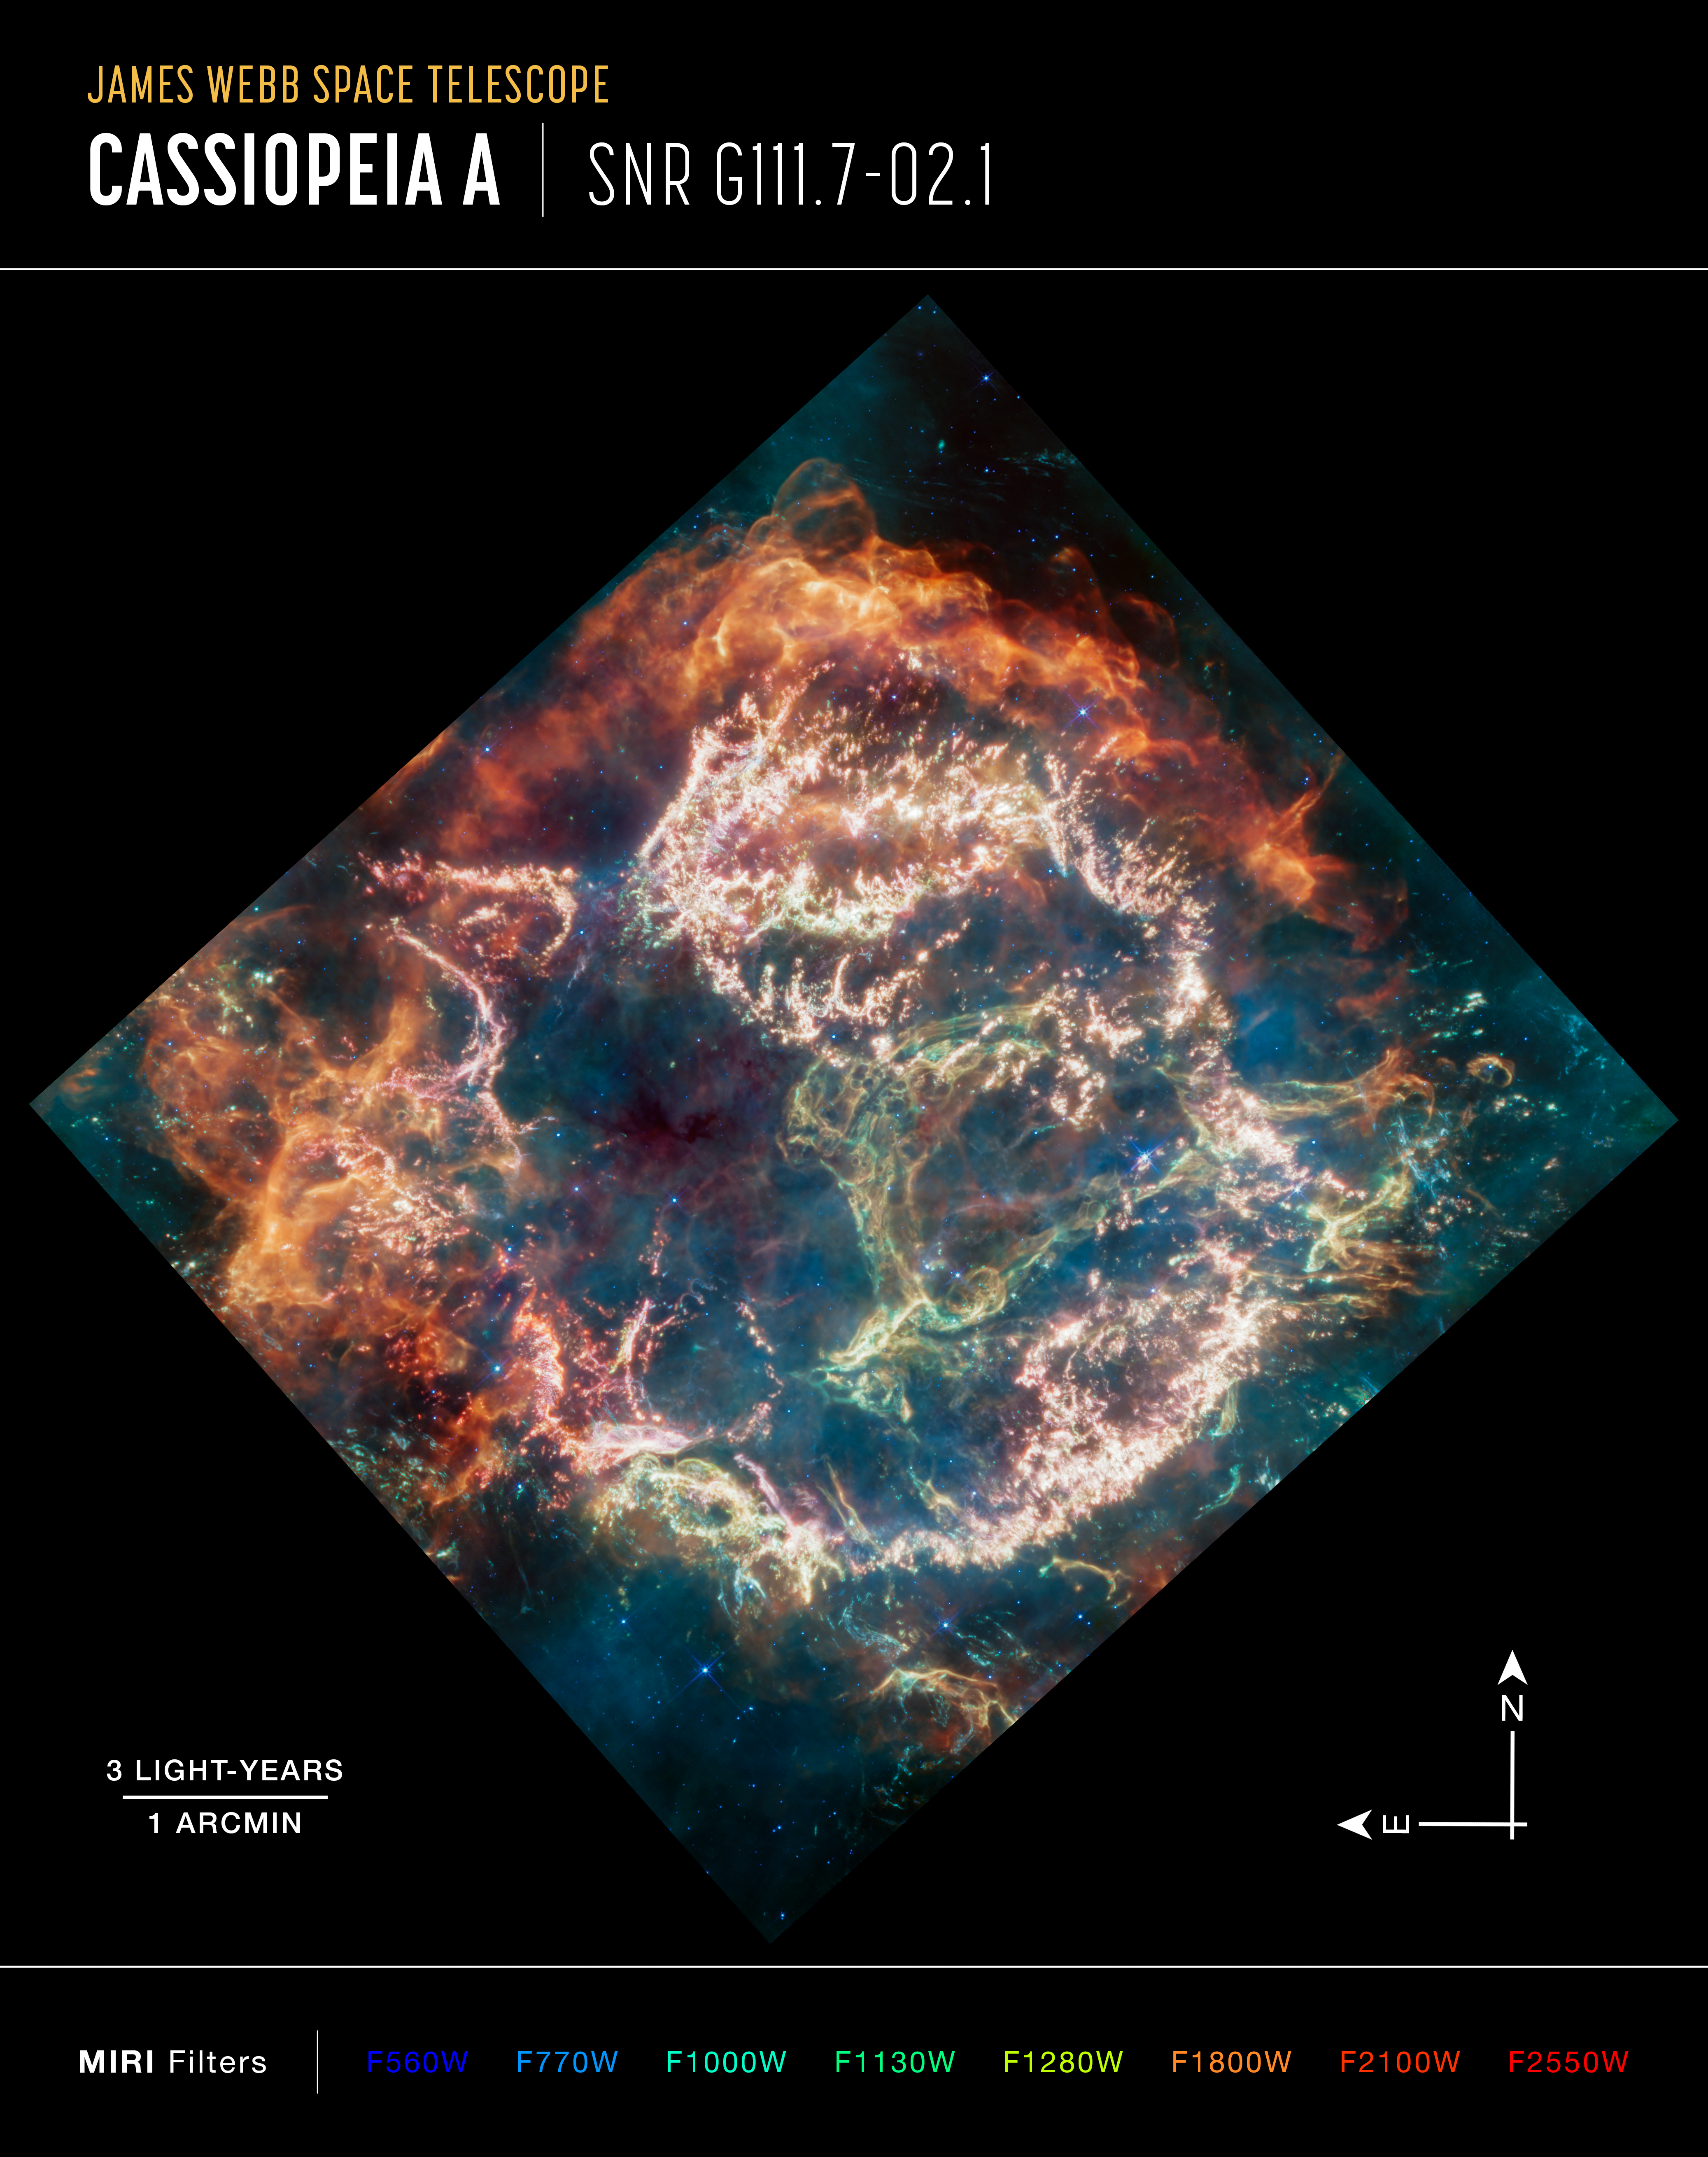

Cassiopeia A (MIRI Image, Annotated)

Cassiopeia A (Cas A) is a supernova remnant located about 11 000 light-years from Earth in the constellation Cassiopeia. It spans approximately 10 light-years. This new image uses data from Webb’s Mid-InfraRed Instrument (MIRI) to reveal Cas A in a new light.

On the remnant’s exterior, particularly at the top and left, lie curtains of material appearing orange and red that are due to emission from warm dust. This marks where ejected material from the exploded star is ramming into surrounding circumstellar material.

Interior to this outer shell lie mottled filaments of bright pink studded with clumps and knots. This represents material from the star itself, and likely shines by the light produced by a mix of heavy elements and dust emission. The stellar material can also be seen as fainter wisps near the cavity’s interior.

A loop represented in green extends across the right side of the central cavity. Its shape and complexity are unexpected and challenging for scientists to understand.

This image combines data from various filters, with the colour red assigned to 25.5 microns (F2550W), orange-red to 21 microns (F2100W), orange to 18 microns (F1800W), yellow to 12.8 microns (F1280W), green to 11.3 microns (F1130W), cyan to 10 microns (F1000W), light blue to 7.7 microns (F770W), and blue to 5.6 microns (F560W). The data come from the general observer program 1947.

Credit: NASA, ESA, CSA, D. Milisavljevic (Purdue University), T. Temim (Princeton University), I. De Looze (UGent), J. DePasquale (STScI)